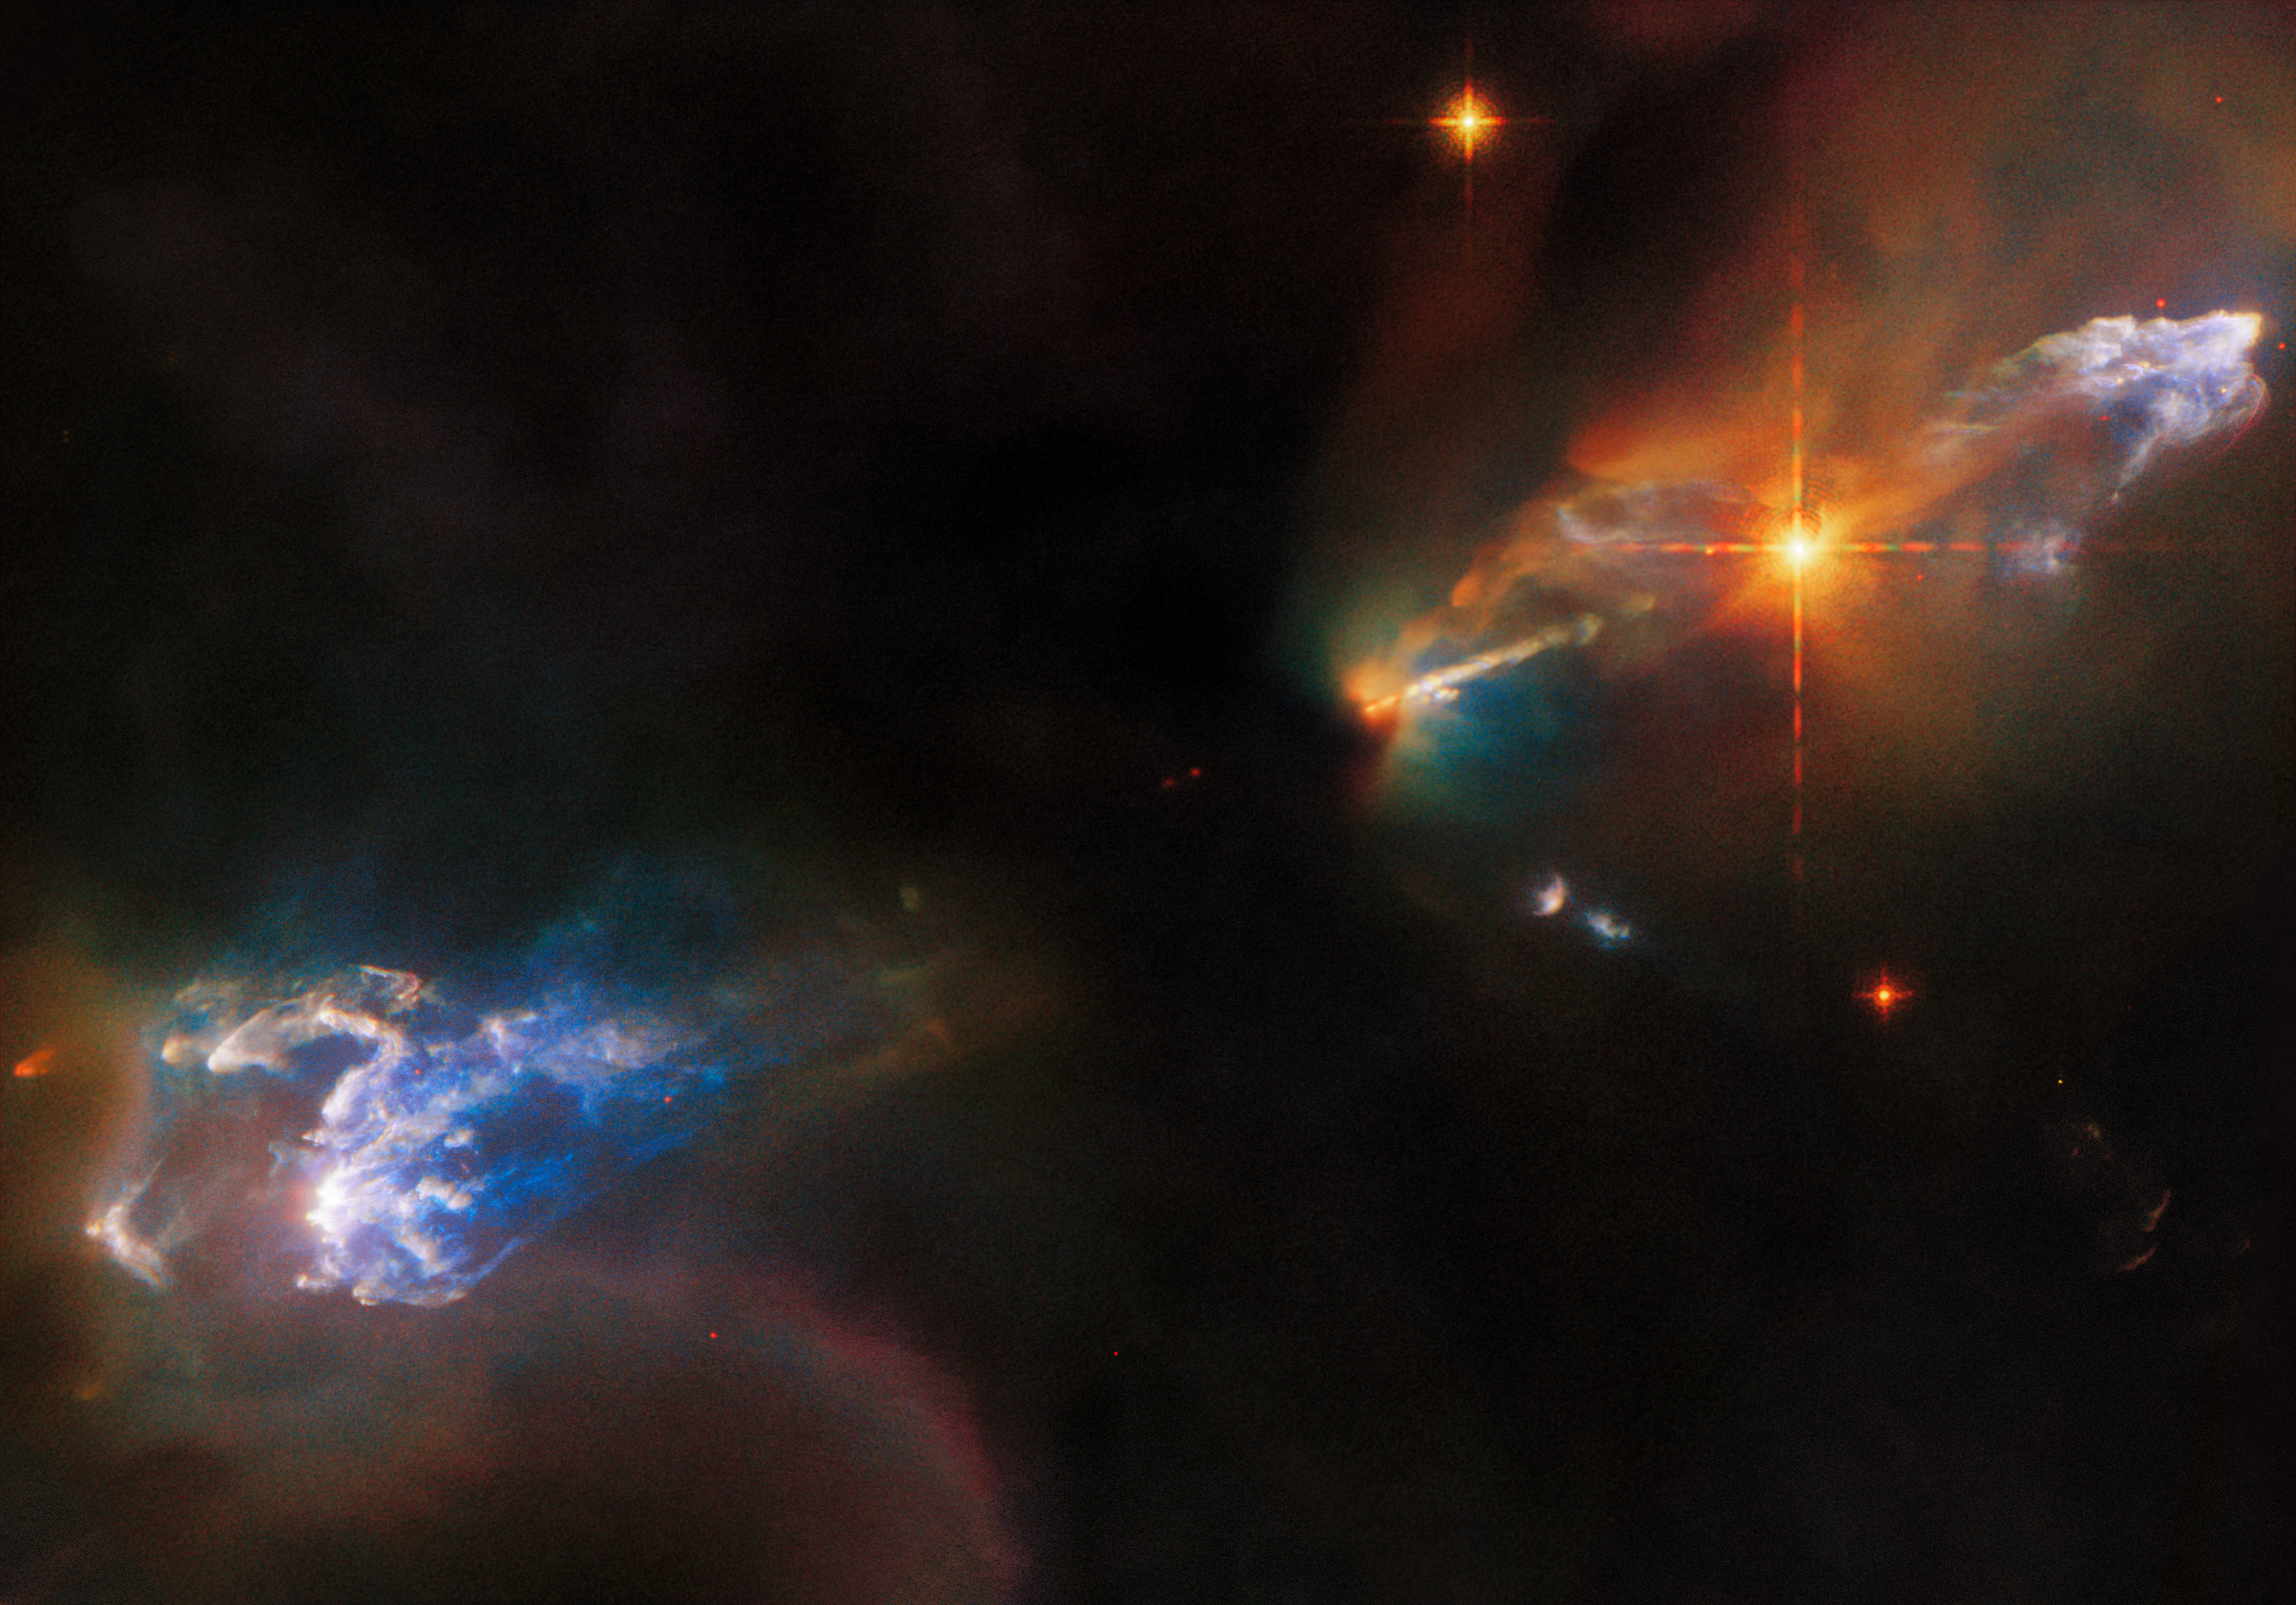

Multiwavelength View of a Turbulent Stellar Nursery

The lives of newborn stars are tempestuous, as this image of the Herbig–Haro objects HH 1 and HH 2 from the NASA/ESA Hubble Space Telescope depicts. Both objects are in the constellation Orion and lie around 1250 light-years from Earth. HH 1 is the luminous cloud above the bright star in the upper right of this image, and HH 2 is the cloud in the bottom left. While both Herbig–Haro objects are visible, the young star system responsible for their creation is lurking out of sight, swaddled in the thick clouds of dust at the centre of this image. However, an outflow of gas from one of these stars can be seen streaming out from the central dark cloud as a bright jet. Meanwhile, the bright star between that jet and the HH 1 cloud was once thought to be the source of these jets, but it is now known to be an unrelated double star that formed nearby.

Herbig–Haro objects are glowing clumps found around some newborn stars, and are created when jets of gas thrown outwards from these young stars collide with surrounding gas and dust at incredibly high speeds. In 2002 Hubble observations revealed that parts of HH 1 are moving at more than 400 kilometres per second!

This scene from a turbulent stellar nursery was captured with Hubble’s Wide Field Camera 3 using 11 different filters at infrared, visible, and ultraviolet wavelengths. Each of these filters is sensitive to just a small slice of the electromagnetic spectrum, and they allow astronomers to pinpoint interesting processes that emit light at specific wavelengths.

In the case of HH 1/2, two groups of astronomers requested Hubble observations for two different studies. The first delved into the structure and motion of the Herbig–Haro objects visible in this image, giving astronomers a better understanding of the physical processes occurring when outflows from young stars collide with surrounding gas and dust. The second study instead investigated the outflows themselves to lay the groundwork for future observations with the NASA/ESA/CSA James Webb Space Telescope. Webb, with its ability to peer past the clouds of dust enveloping young stars, will revolutionise the study of outflows from young stars.

Credit: ESA/Hubble & NASA, B. Reipurth, B. Nisini